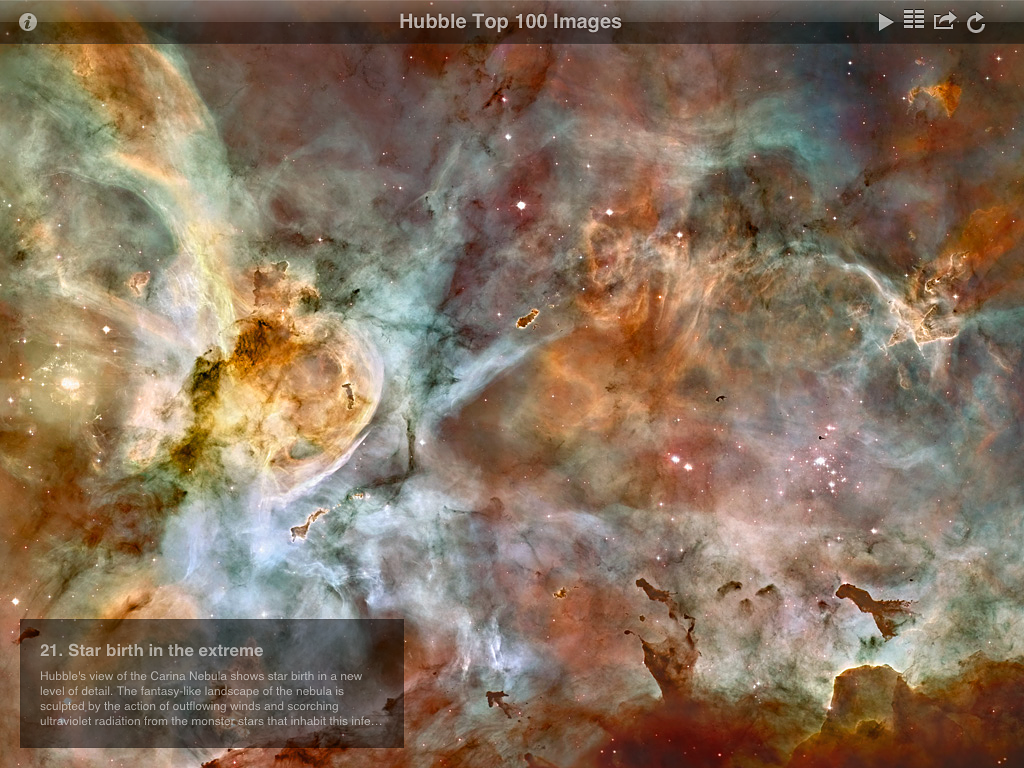

Screenshot from ESA/Hubble top 100 images v2.0 app

This is a screenshot showing one of the spectacular astronomical images from the updated version of ESA/Hubble popular Top 100 Images app. The new version takes full advantage of the third generation iPad retina display and quad core graphics.

Credit: ESA/Hubble